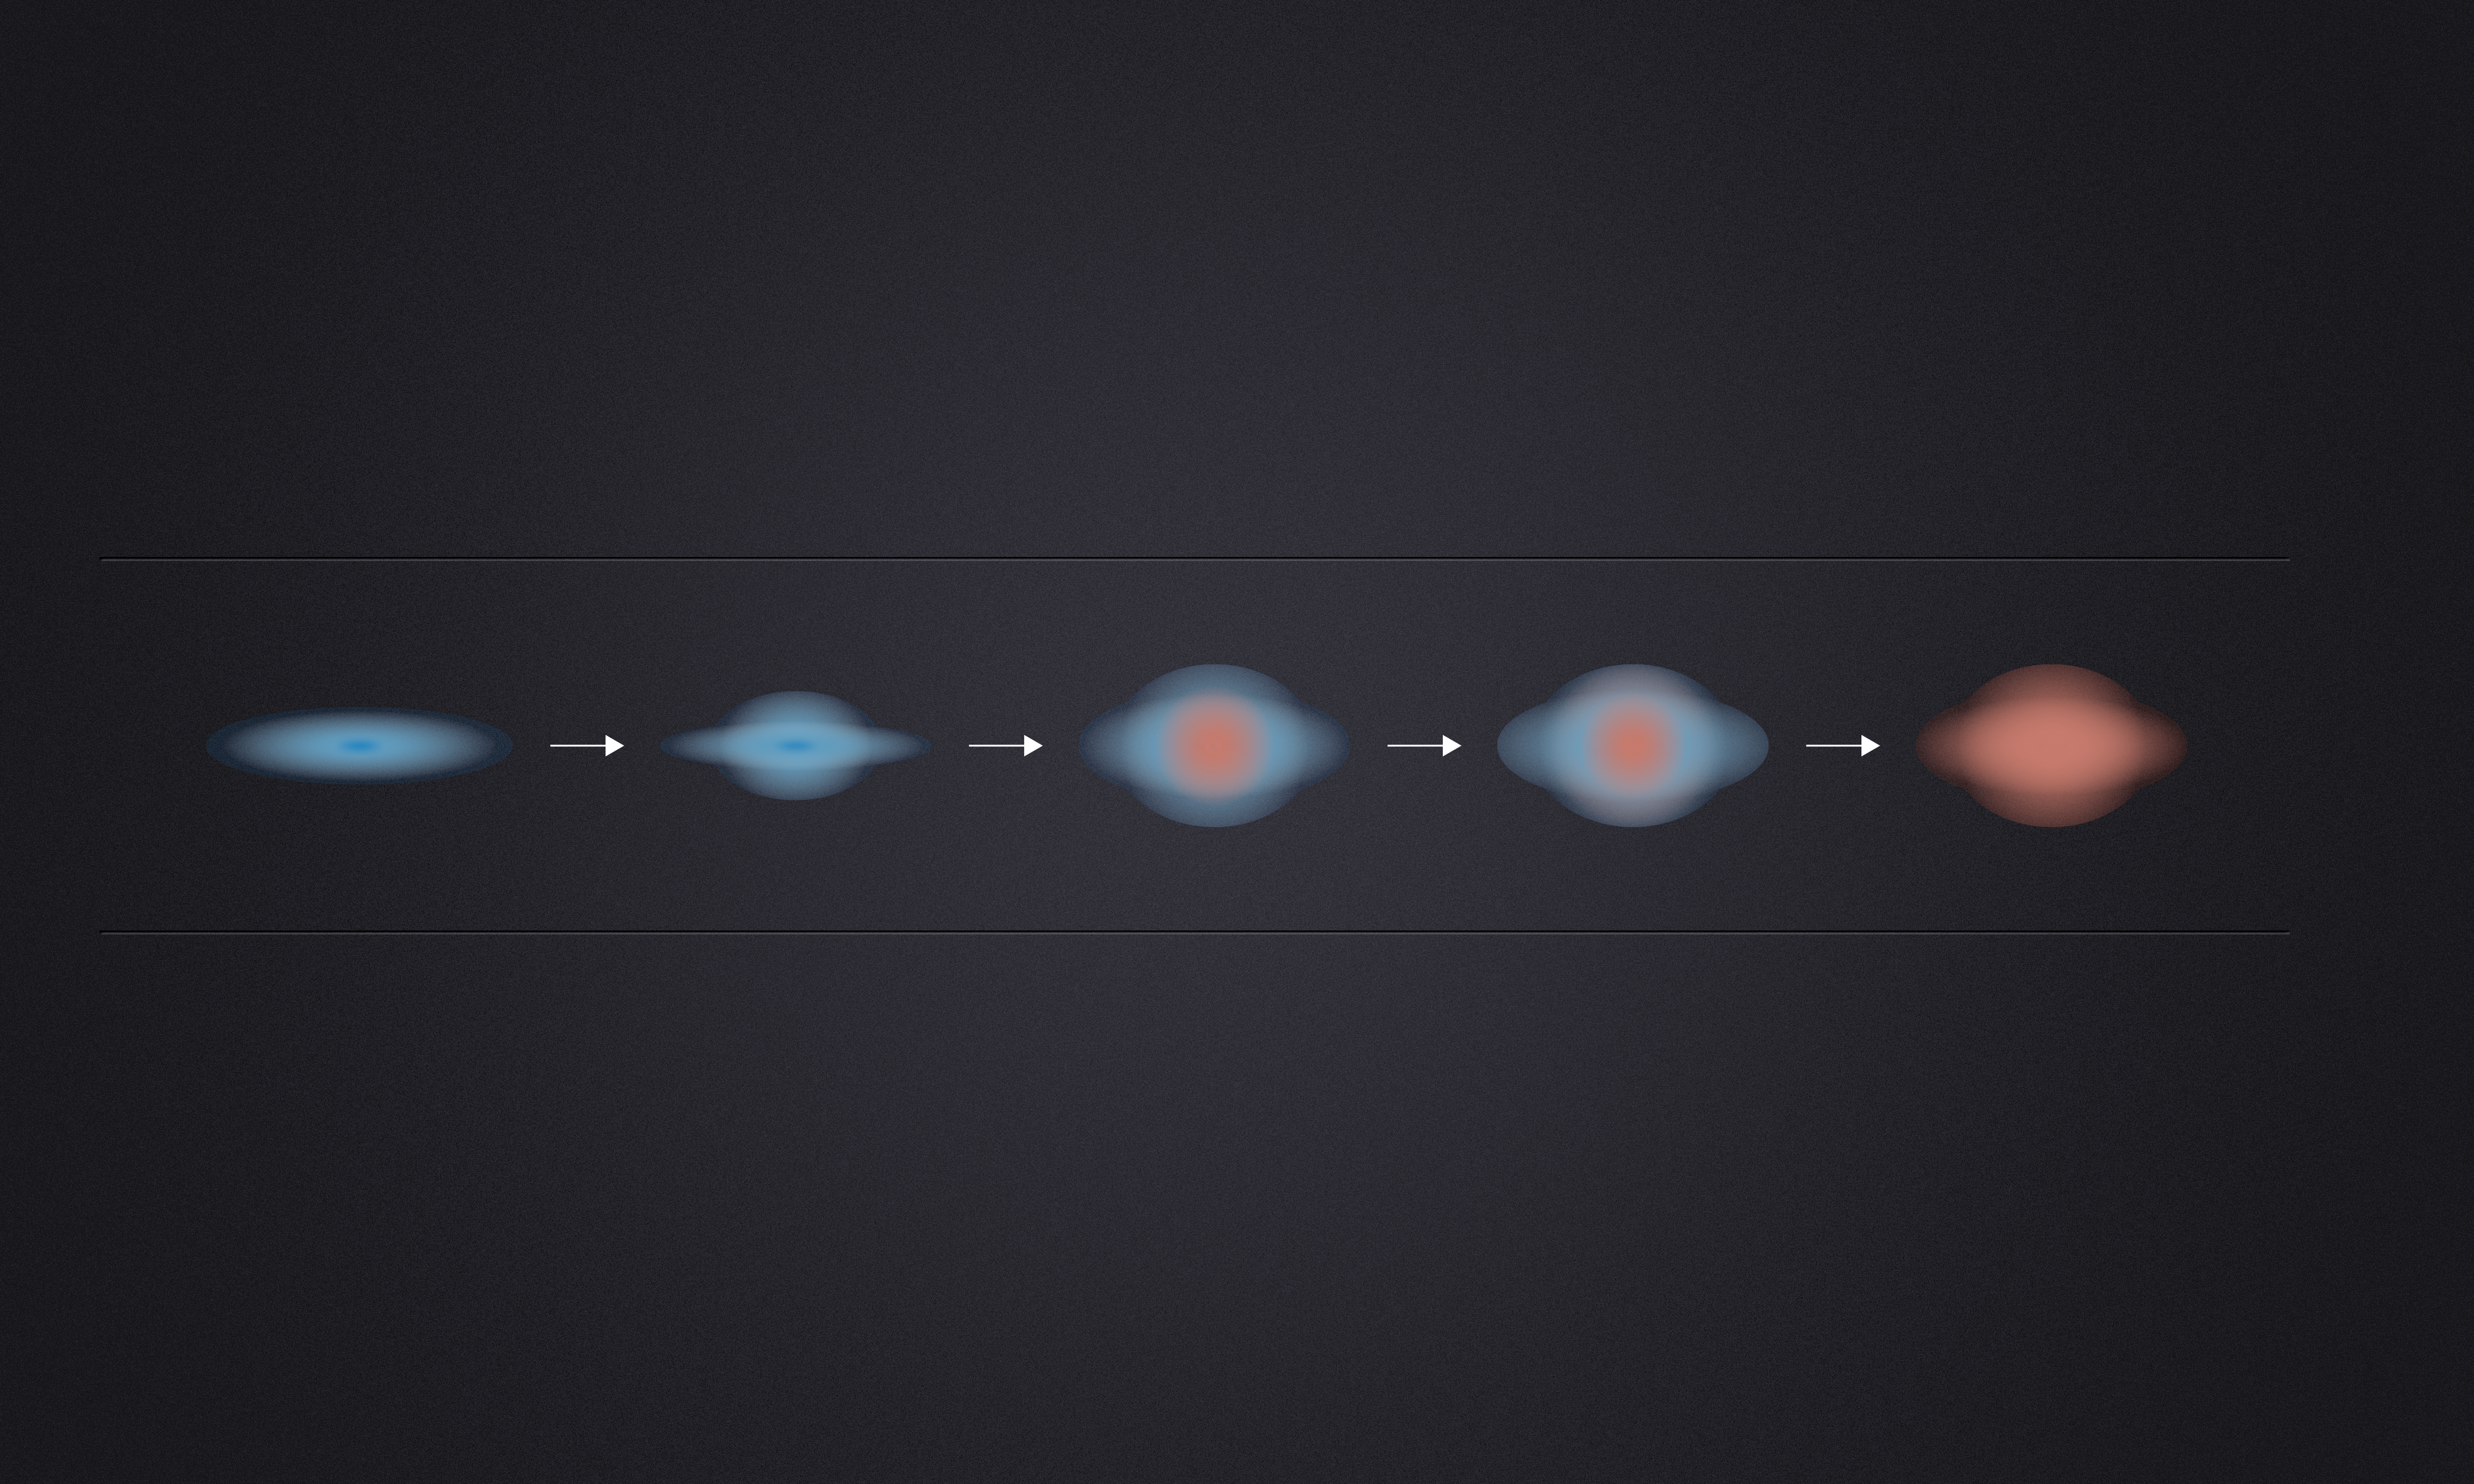

Galaxies die from the inside out

Star formation in what are now "dead" galaxies sputtered out billions of years ago. ESO’s Very Large Telescope and the NASA/ESA Hubble Space Telescope have revealed that three billion years after the Big Bang, these galaxies still made stars on their outskirts, but no longer in their interiors. The quenching of star formation seems to have started in the cores of the galaxies and then spread to the outer parts.

This diagram illustrates this process. Galaxies in the early Universe appear at the left. The blue regions are where star formation is in progress and the red regions are the "dead" regions where only older redder stars remain and there are no more young blue stars being formed. The resulting giant spheroidal galaxies in the modern Universe appear on the right.

Credit: ESA/Hubble and ESO